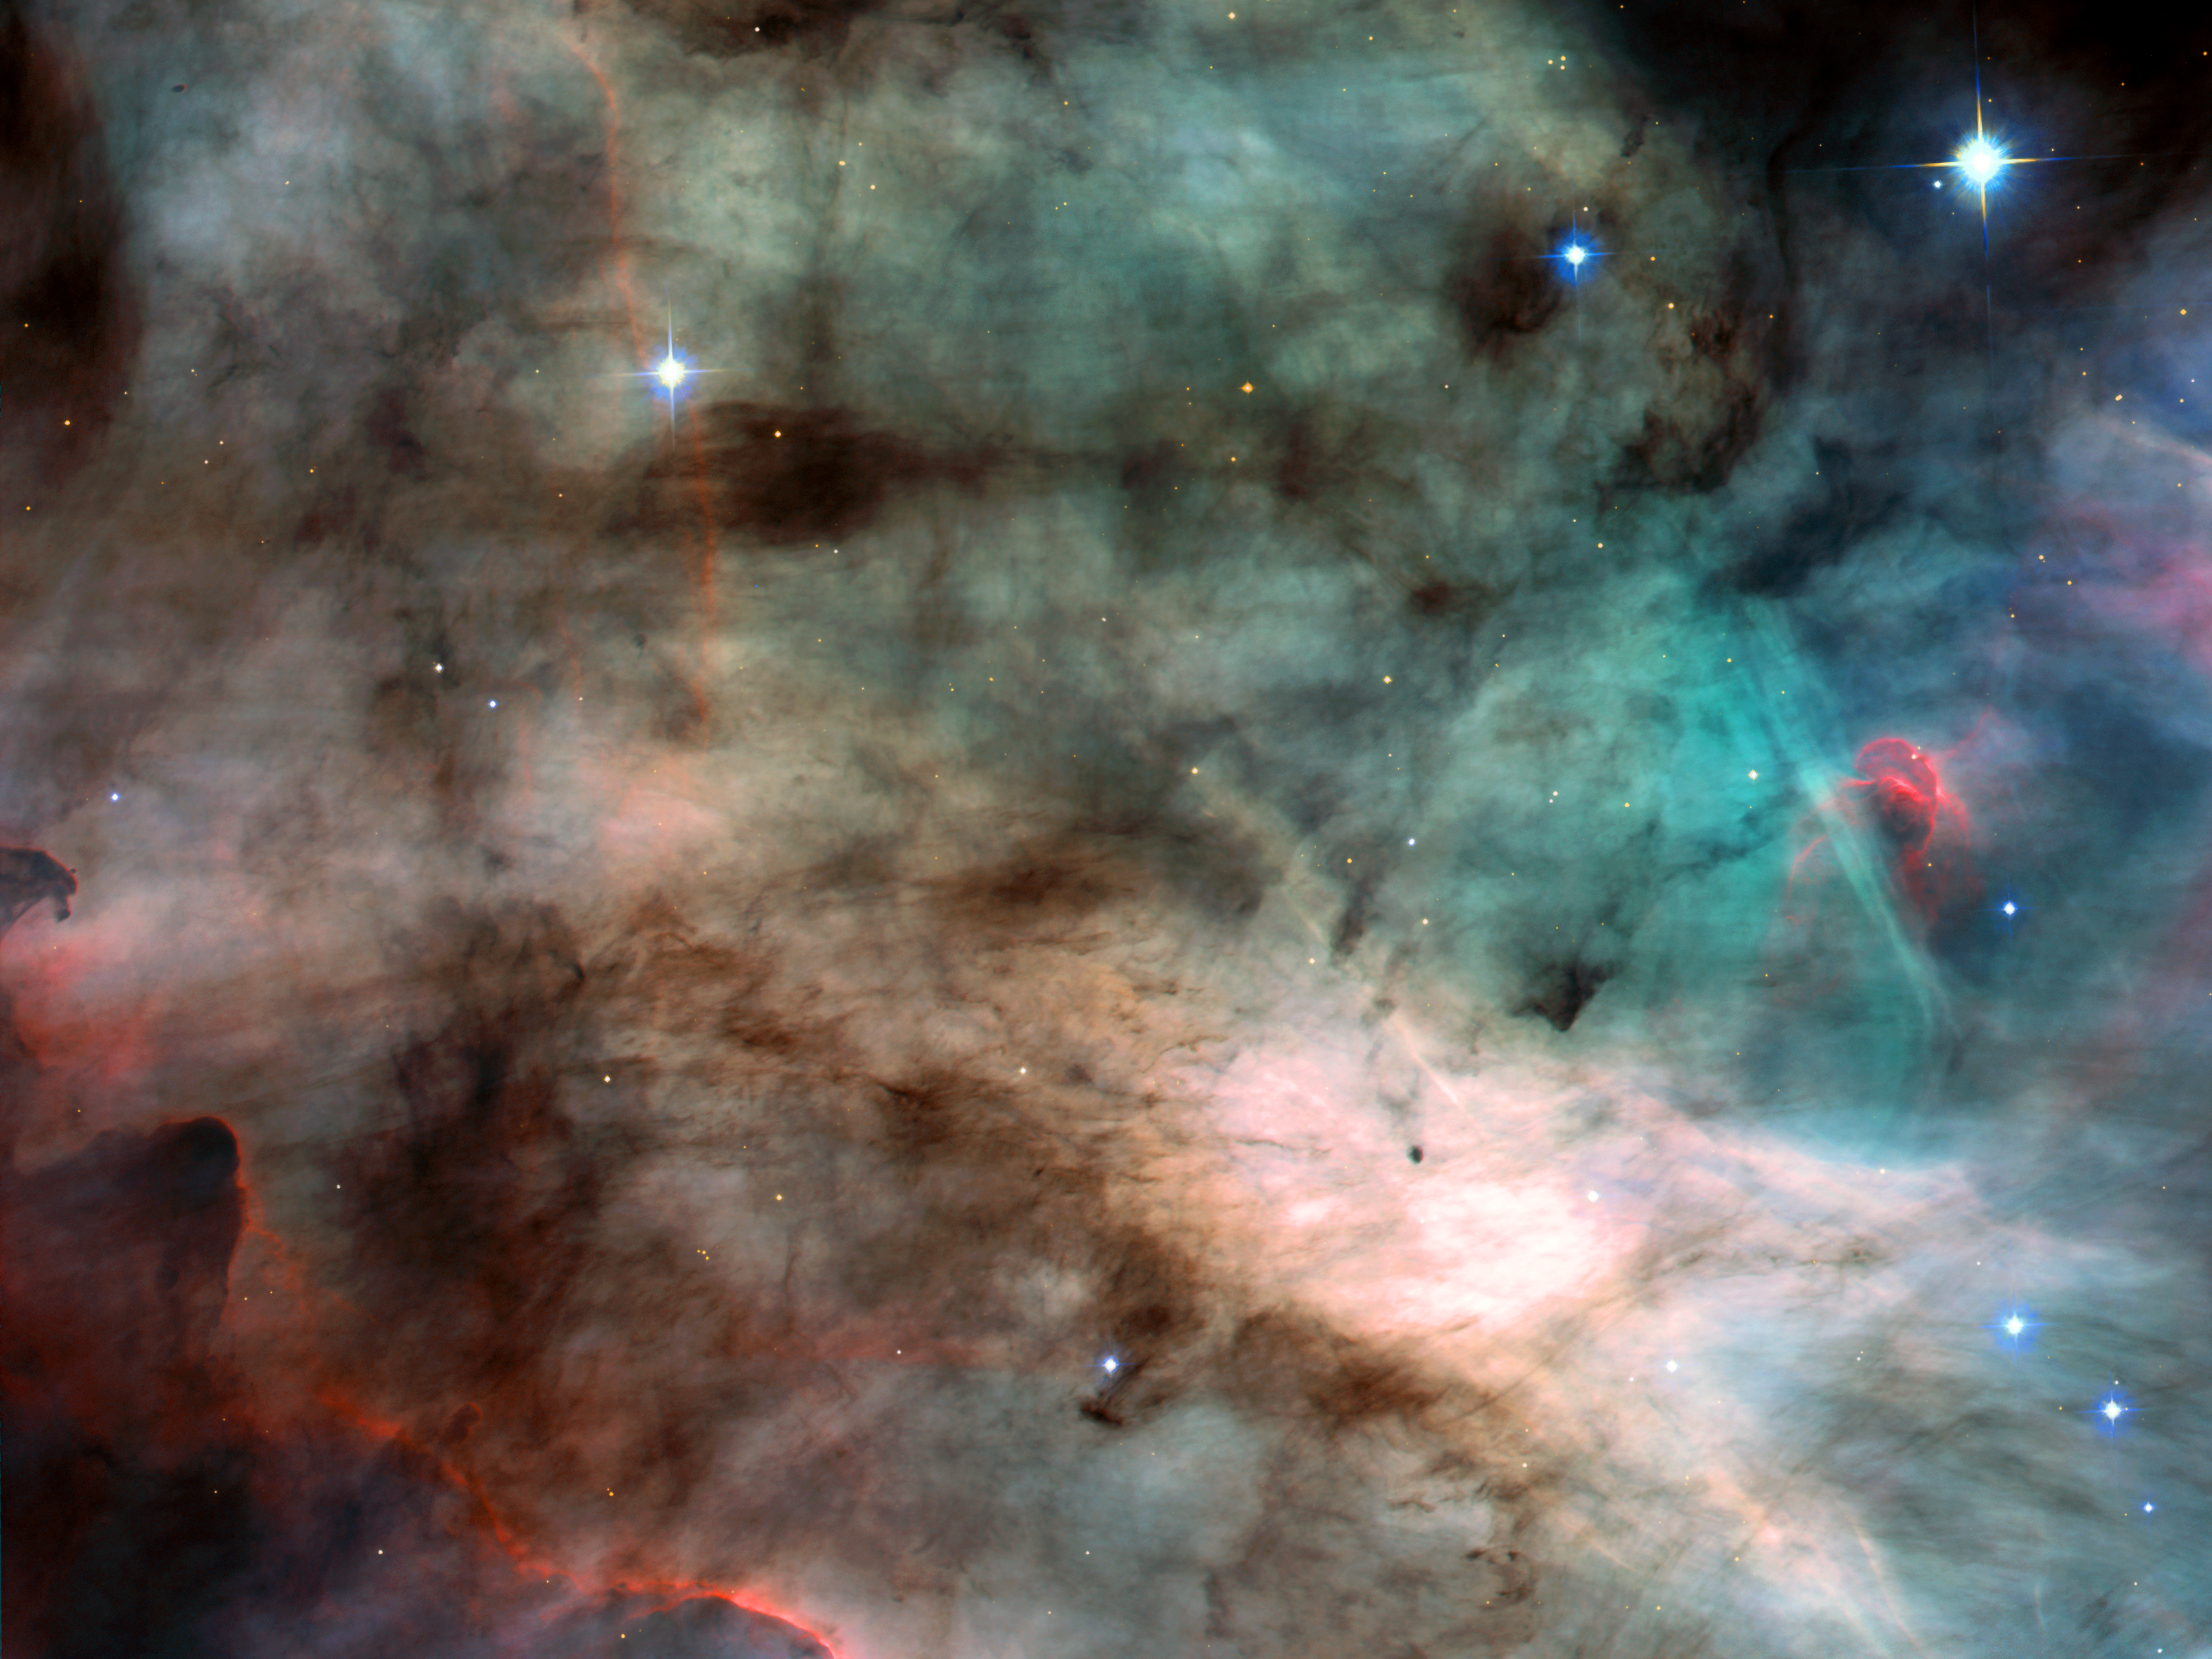

Hubble's newest camera eyes hotbed of star formation

A watercolour fantasyland? No. It's actually a photograph of the centre of the Swan Nebula, or M17, a hotbed of newly born stars wrapped in colourful blankets of glowing gas and cradled in an enormous cold, dark hydrogen cloud. This stunning picture was taken by the newly installed Advanced Camera for Surveys (ACS) aboard the NASA/ESA Hubble Space Telescope.

The region of the nebula shown in this picture is about 3500 times wider than our Solar System. The area also represents about 60 percent of the total view captured by ACS. The nebula resides 5500 light-years away in the constellation Sagittarius.

Like its famous cousin in Orion, the Swan Nebula is illuminated by ultraviolet radiation from young, massive stars - each about six times hotter and 30 times more massive than the Sun - located just beyond the upper right corner of the image. The powerful radiation from these stars evaporates and erodes the dense cloud of cold gas within which the stars formed. The blistered walls of the hollow cloud shine primarily in the blue, green, and red light emitted by excited atoms of hydrogen, nitrogen, oxygen, and sulphur. Particularly striking is the rose-like feature, seen to the right of centre, which glows in the red light emitted by hydrogen and sulphur.

As the infant stars evaporate the surrounding cloud, they expose dense pockets of gas that may contain developing stars. Because these dense pockets are more resistant to the withering radiation than the surrounding cloud, they appear as sculptures in the walls of the cloud or as isolated islands in a sea of glowing gas. One isolated pocket is seen at the centre of the brightest region of the nebula and is about 10 times larger than our Solar System. Other dense pockets of gas have formed the remarkable feature jutting inward from the left edge of the image, which resembles the famous Horsehead Nebula in Orion.

The ACS made this observation on 1 and 2 April 2002. The colour image is constructed from four separate images taken in these filters: blue, near infrared, hydrogen alpha, and doubly ionised oxygen.

Image credit: NASA, the ACS Science Team (H. Ford, G. Illingworth, M. Clampin, G. Hartig, T. Allen, K. Anderson, F. Bartko, N. Benitez, J. Blakeslee, R. Bouwens, T. Broadhurst, R. Brown, C. Burrows, D. Campbell, E. Cheng, N. Cross, P. Feldman, M. Franx, D. Golimowski, C. Gronwall, R. Kimble, J. Krist, M. Lesser, D. Magee, A. Martel, W. J. McCann, G. Meurer, G. Miley, M. Postman, P. Rosati, M. Sirianni, W. Sparks, P. Sullivan, H. Tran, Z. Tsvetanov, R. White, and R. Woodruff) and ESA

Credit: NASA, Holland Ford (JHU), the ACS Science Team and ESA